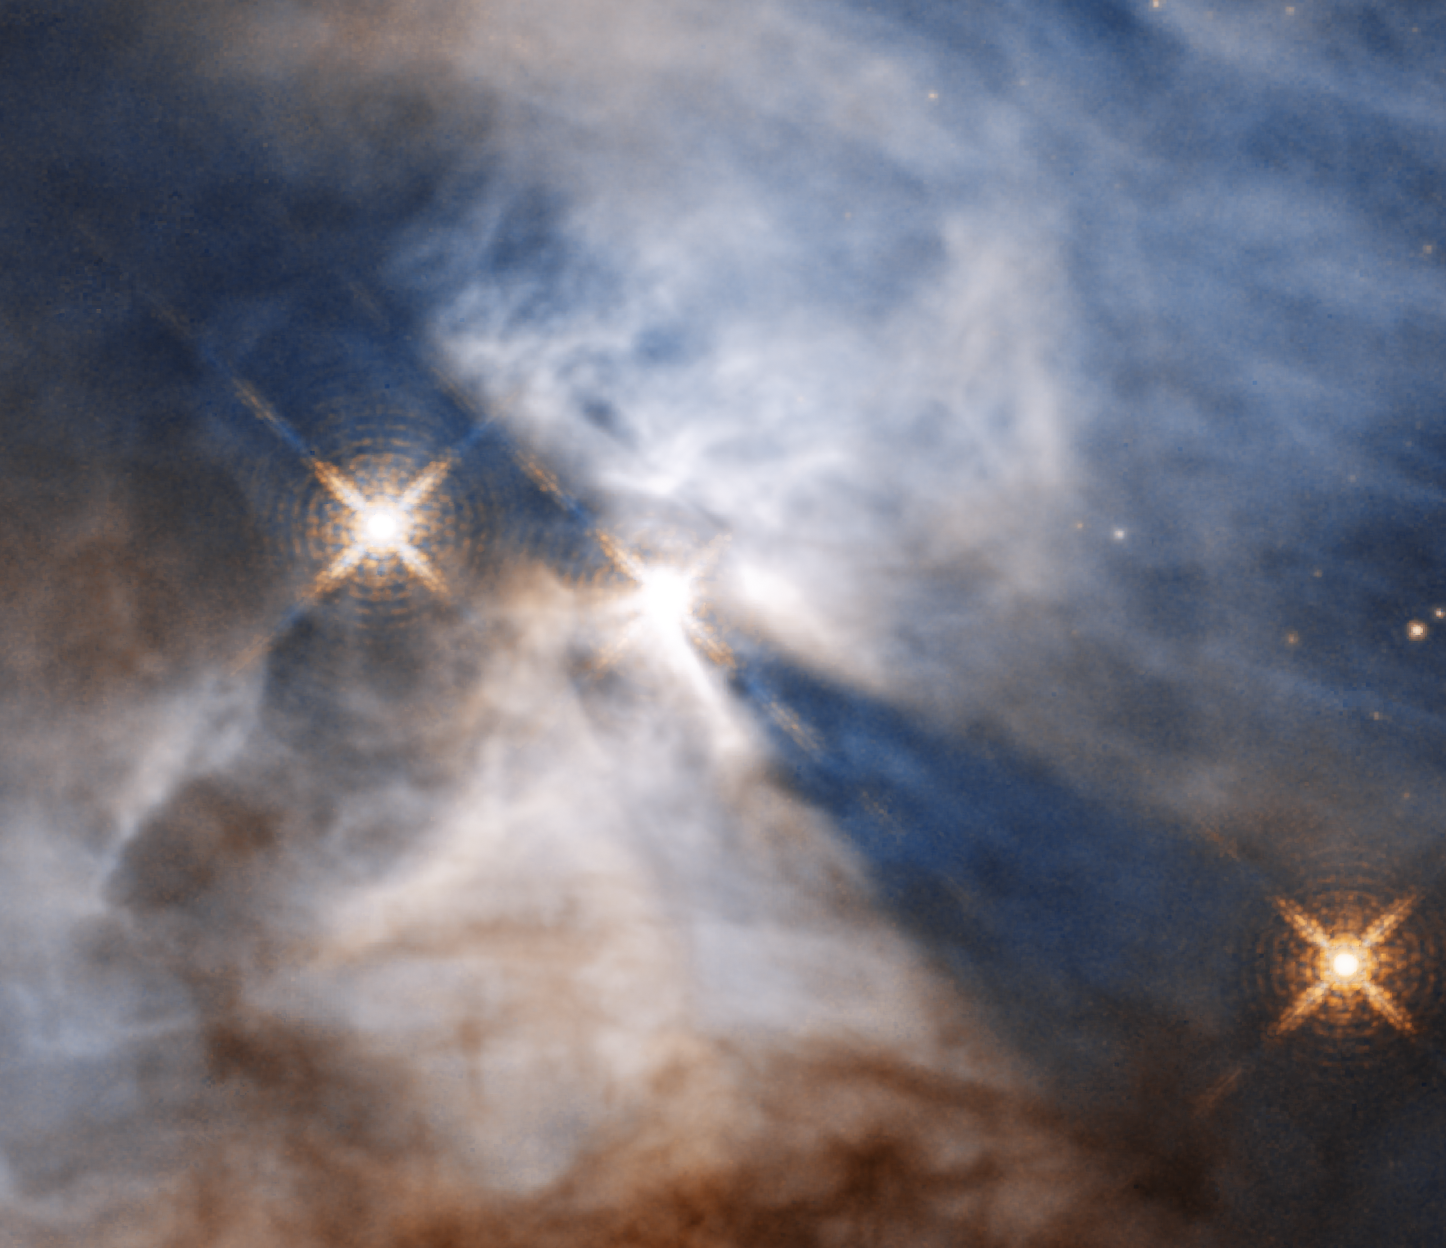

Bat Shadow

This image shows only the feature which was nicknamed the Bat Shadow. It is the shadow of a protoplanetary disc orbiting the star in the centre of the image.

Credit: NASA, ESA, and STScI